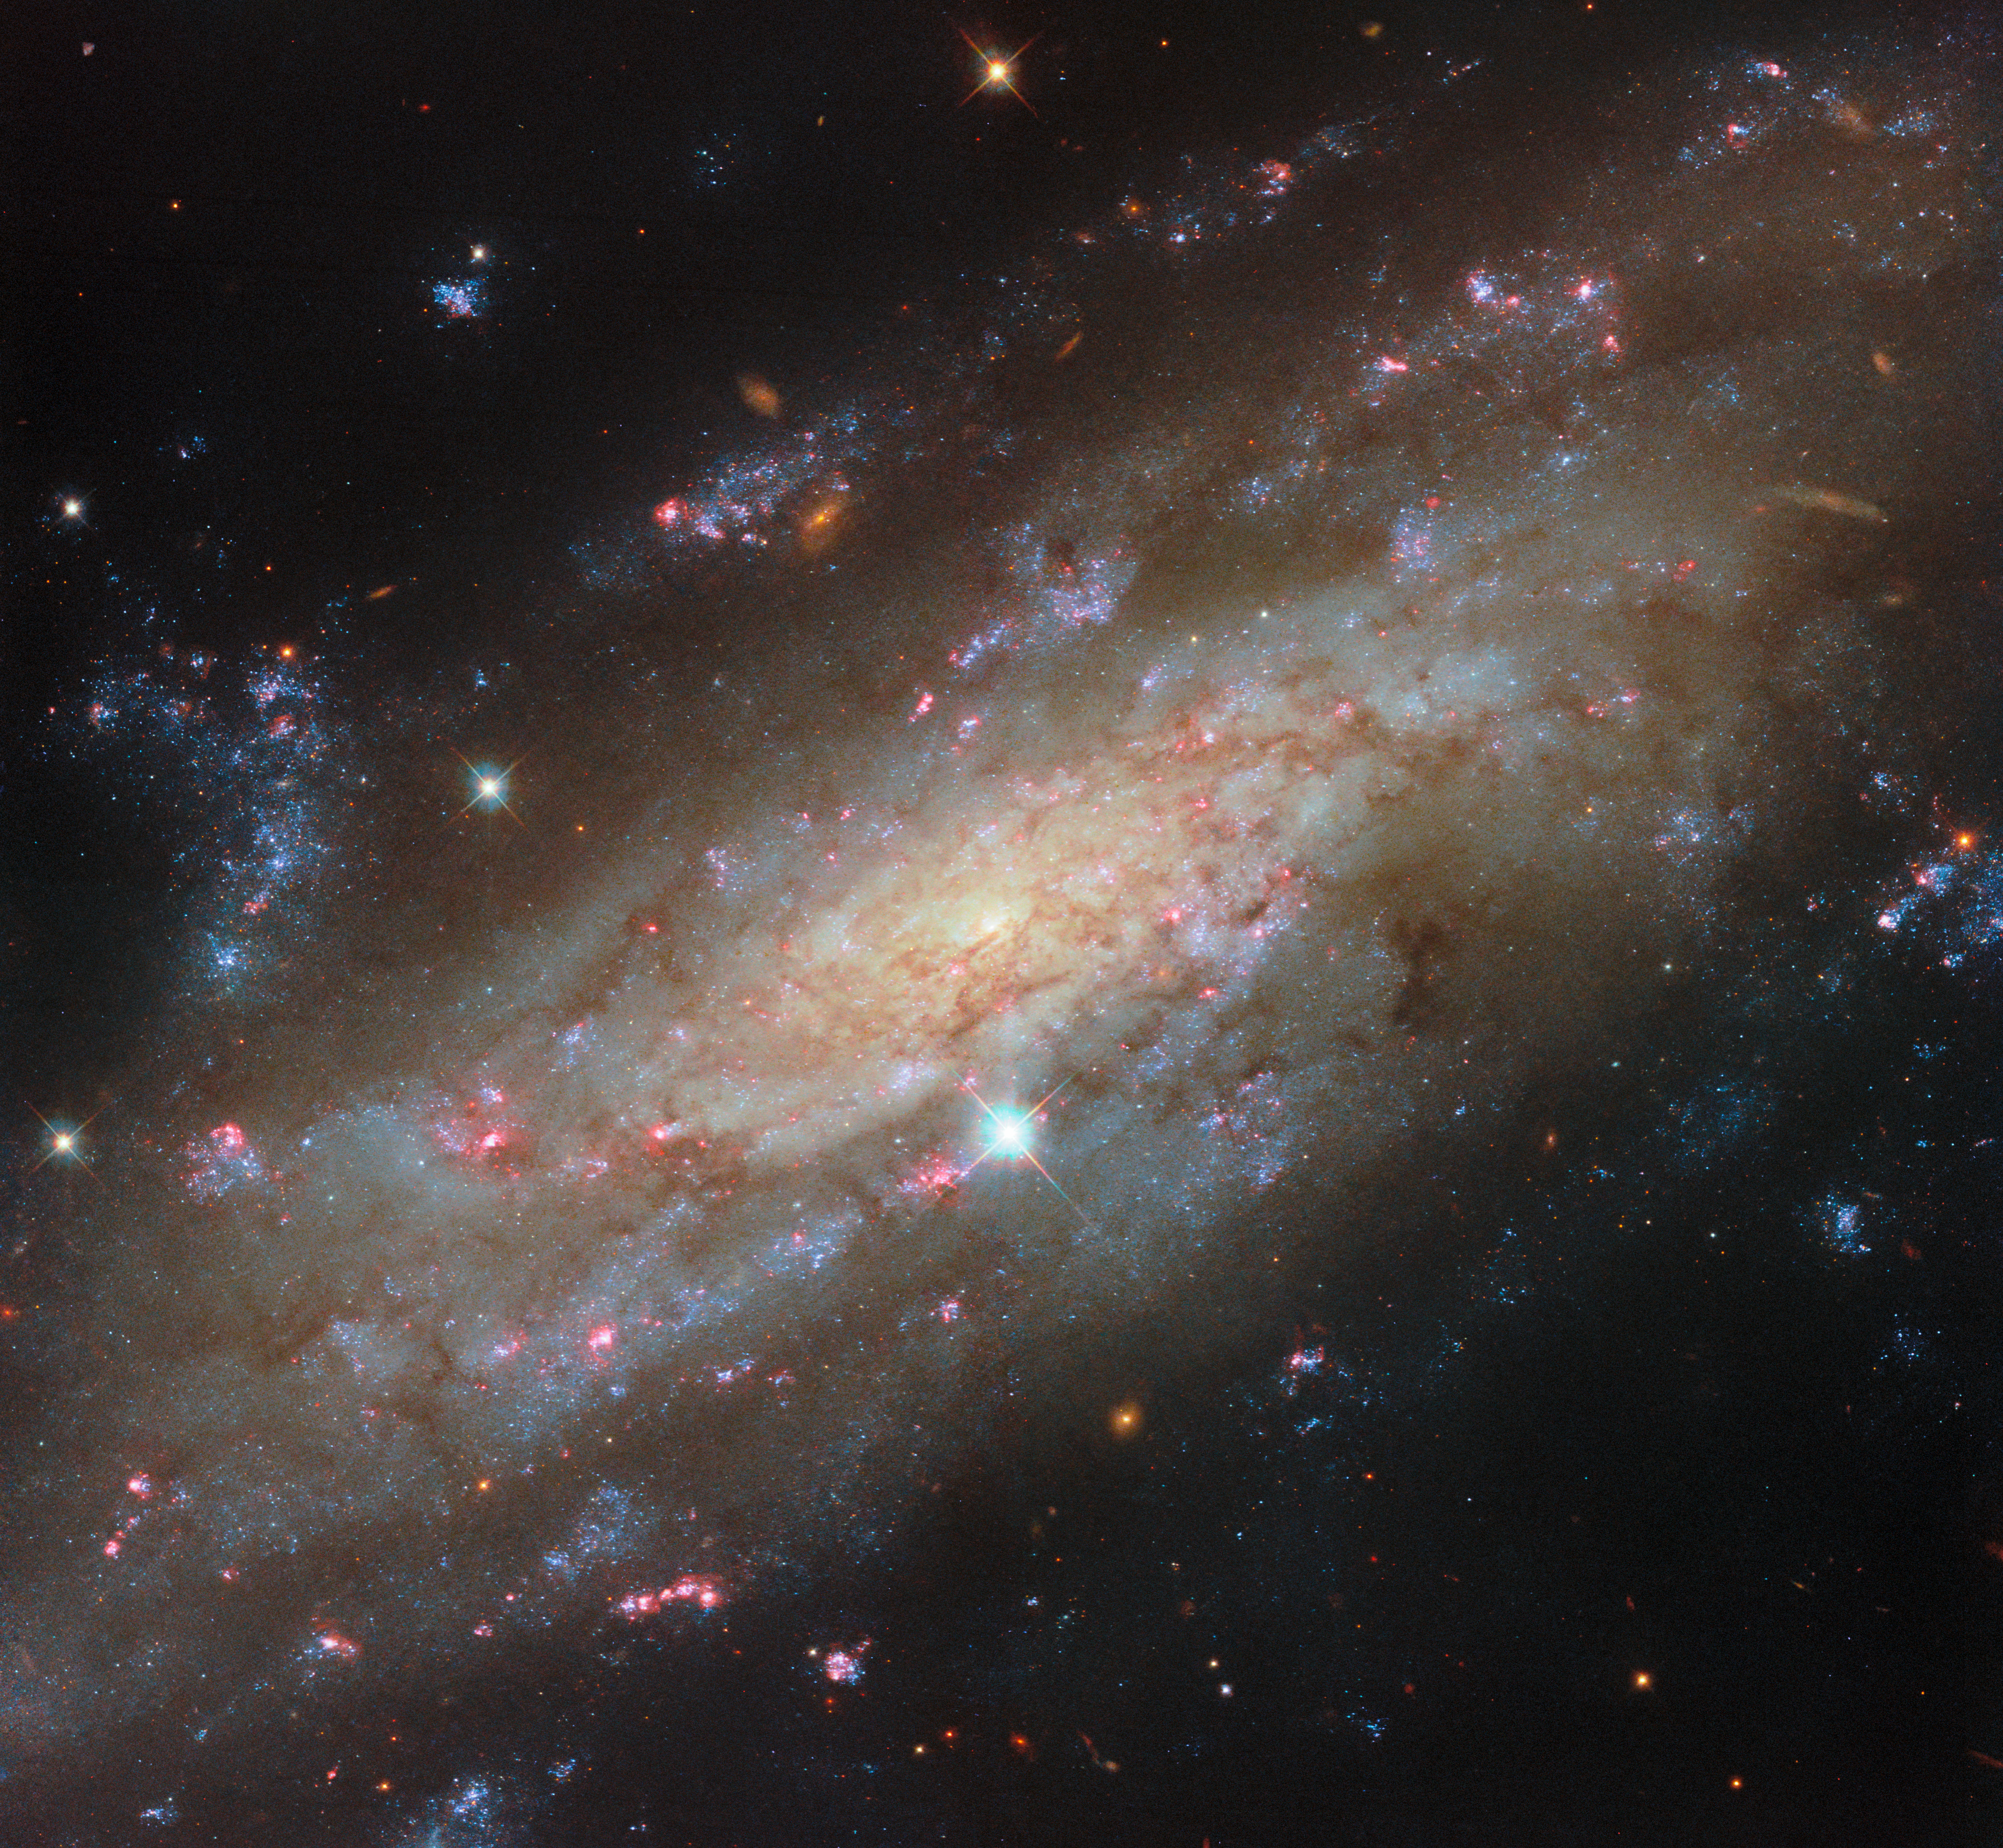

Starry spiral in a familiar neighbourhood

In this ESA/Hubble Picture of the Month, a spiral galaxy glittering with star clusters is the centre of attention. NGC 3137 is located 53 million light-years away in the constellation Antlia (The Air Pump). As a nearby spiral galaxy, this target offers astronomers an excellent opportunity to study the cycle of stellar birth and death, as well as giving researchers a glimpse of a galactic system similar to our own.

NGC 3137 is of particular interest to astronomers because it travels through space with a group of galaxies that is thought to be similar to the Local Group, the galaxy group that contains the Milky Way. Similar to the Local Group, the NGC 3175 group contains two large spiral galaxies: NGC 3137 and NGC 3175, which Hubble has also observed. In the Local Group, the largest members are the Milky Way galaxy and Andromeda, another spiral galaxy. In addition to two large spiral galaxies, both groups also contain a number of smaller dwarf galaxies, although it’s not yet known how many of these tiny companions the NGC 3175 group has; researchers have found more than 500 dwarf galaxy candidates. By studying this nearby galaxy group, astronomers can learn about the dynamics of our own galactic home.

NGC 3137 is revealed in fantastic detail by Hubble. This image is crafted from observations in six different colour bands, creating a view that highlights several facets of this beautiful spiral. The galaxy’s centre, which is encircled by a network of fine, dusty clouds, hosts a black hole estimated to be 60 million times more massive than the Sun. NGC 3137 is highly inclined from our point of view, giving a unique perspective on its loose, feathery spiral structure. A couple of photobombing Milky Way stars and a smattering of far more distant background galaxies complete the image.

As stunning as each of these features may be, it’s the galaxy’s brilliant star clusters that steal the show. The galaxy is peppered with dense clusters of bright blue stars and glowing red gas clouds, which signal the presence of hot, young stars still encased in their birth nebulae.

Unsurprisingly, these star clusters are exactly what has drawn Hubble’s keen eye. Researchers are using Hubble to carry out an observing programme (#17502; PI: D. Thilker) focusing on star clusters in 55 nearby galaxies. The data collected will help astronomers identify star clusters and the glowing nebulae that surround them, providing a way to measure the ages of stars in galaxies like NGC 3137. These observations give an in-depth view of stellar life in spiral galaxies, from the young stars still in the process of forming to the ancient stellar populations that grew up in the early years of their galactic hosts.

The PHANGS-HST programme for which these observations were taken is part of a larger effort by some of the most powerful observatories on (and around) Earth. Hubble contributes greatly to this massive undertaking, which combines data from the NASA/ESA/CSA James Webb Space Telescope and the Atacama Large Millimetre/submillimetre Array (ALMA). Together, Hubble’s powerful optical and ultraviolet capabilities, Webb’s sensitive infrared eyes, and ALMA’s broad network of radio dishes bring us an unmatched view of star formation in the local Universe.

Credit: ESA/Hubble & NASA, D. Thilker and the PHANGS-HST Team